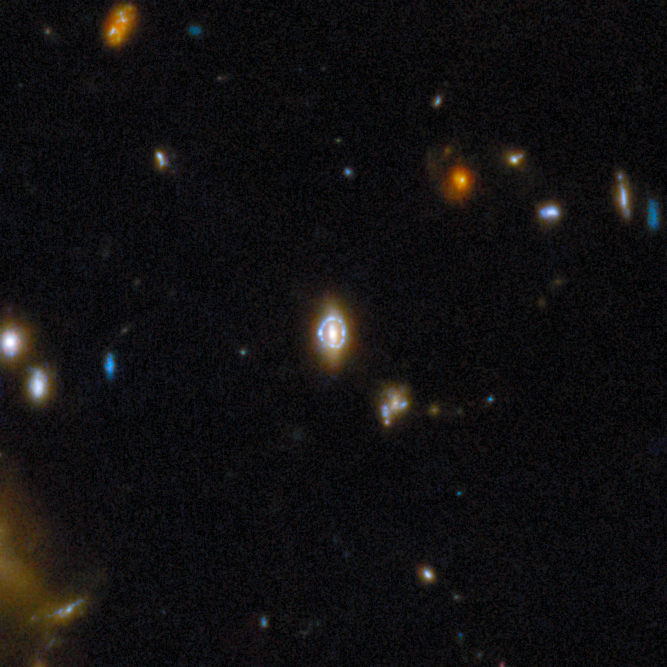

Gravitational lens COSJ100018+022138

Previously confirmed using data from the NASA/ESA Hubble Space Telescope, this lens is revealed in greater detail by Webb. The elliptical lensing galaxy is seen as it was when the Universe was about 4 billion years old. The blue galaxy whose light has been warped into a circle goes back even further, shown as it was when the Universe was less than 2 billion years old.

This gravitational lens is one of eight featured in the September 2025 Picture of the Month.

Credit: ESA/Webb, NASA & CSA, G. Gozaliasl, A. Koekemoer, M. Franco